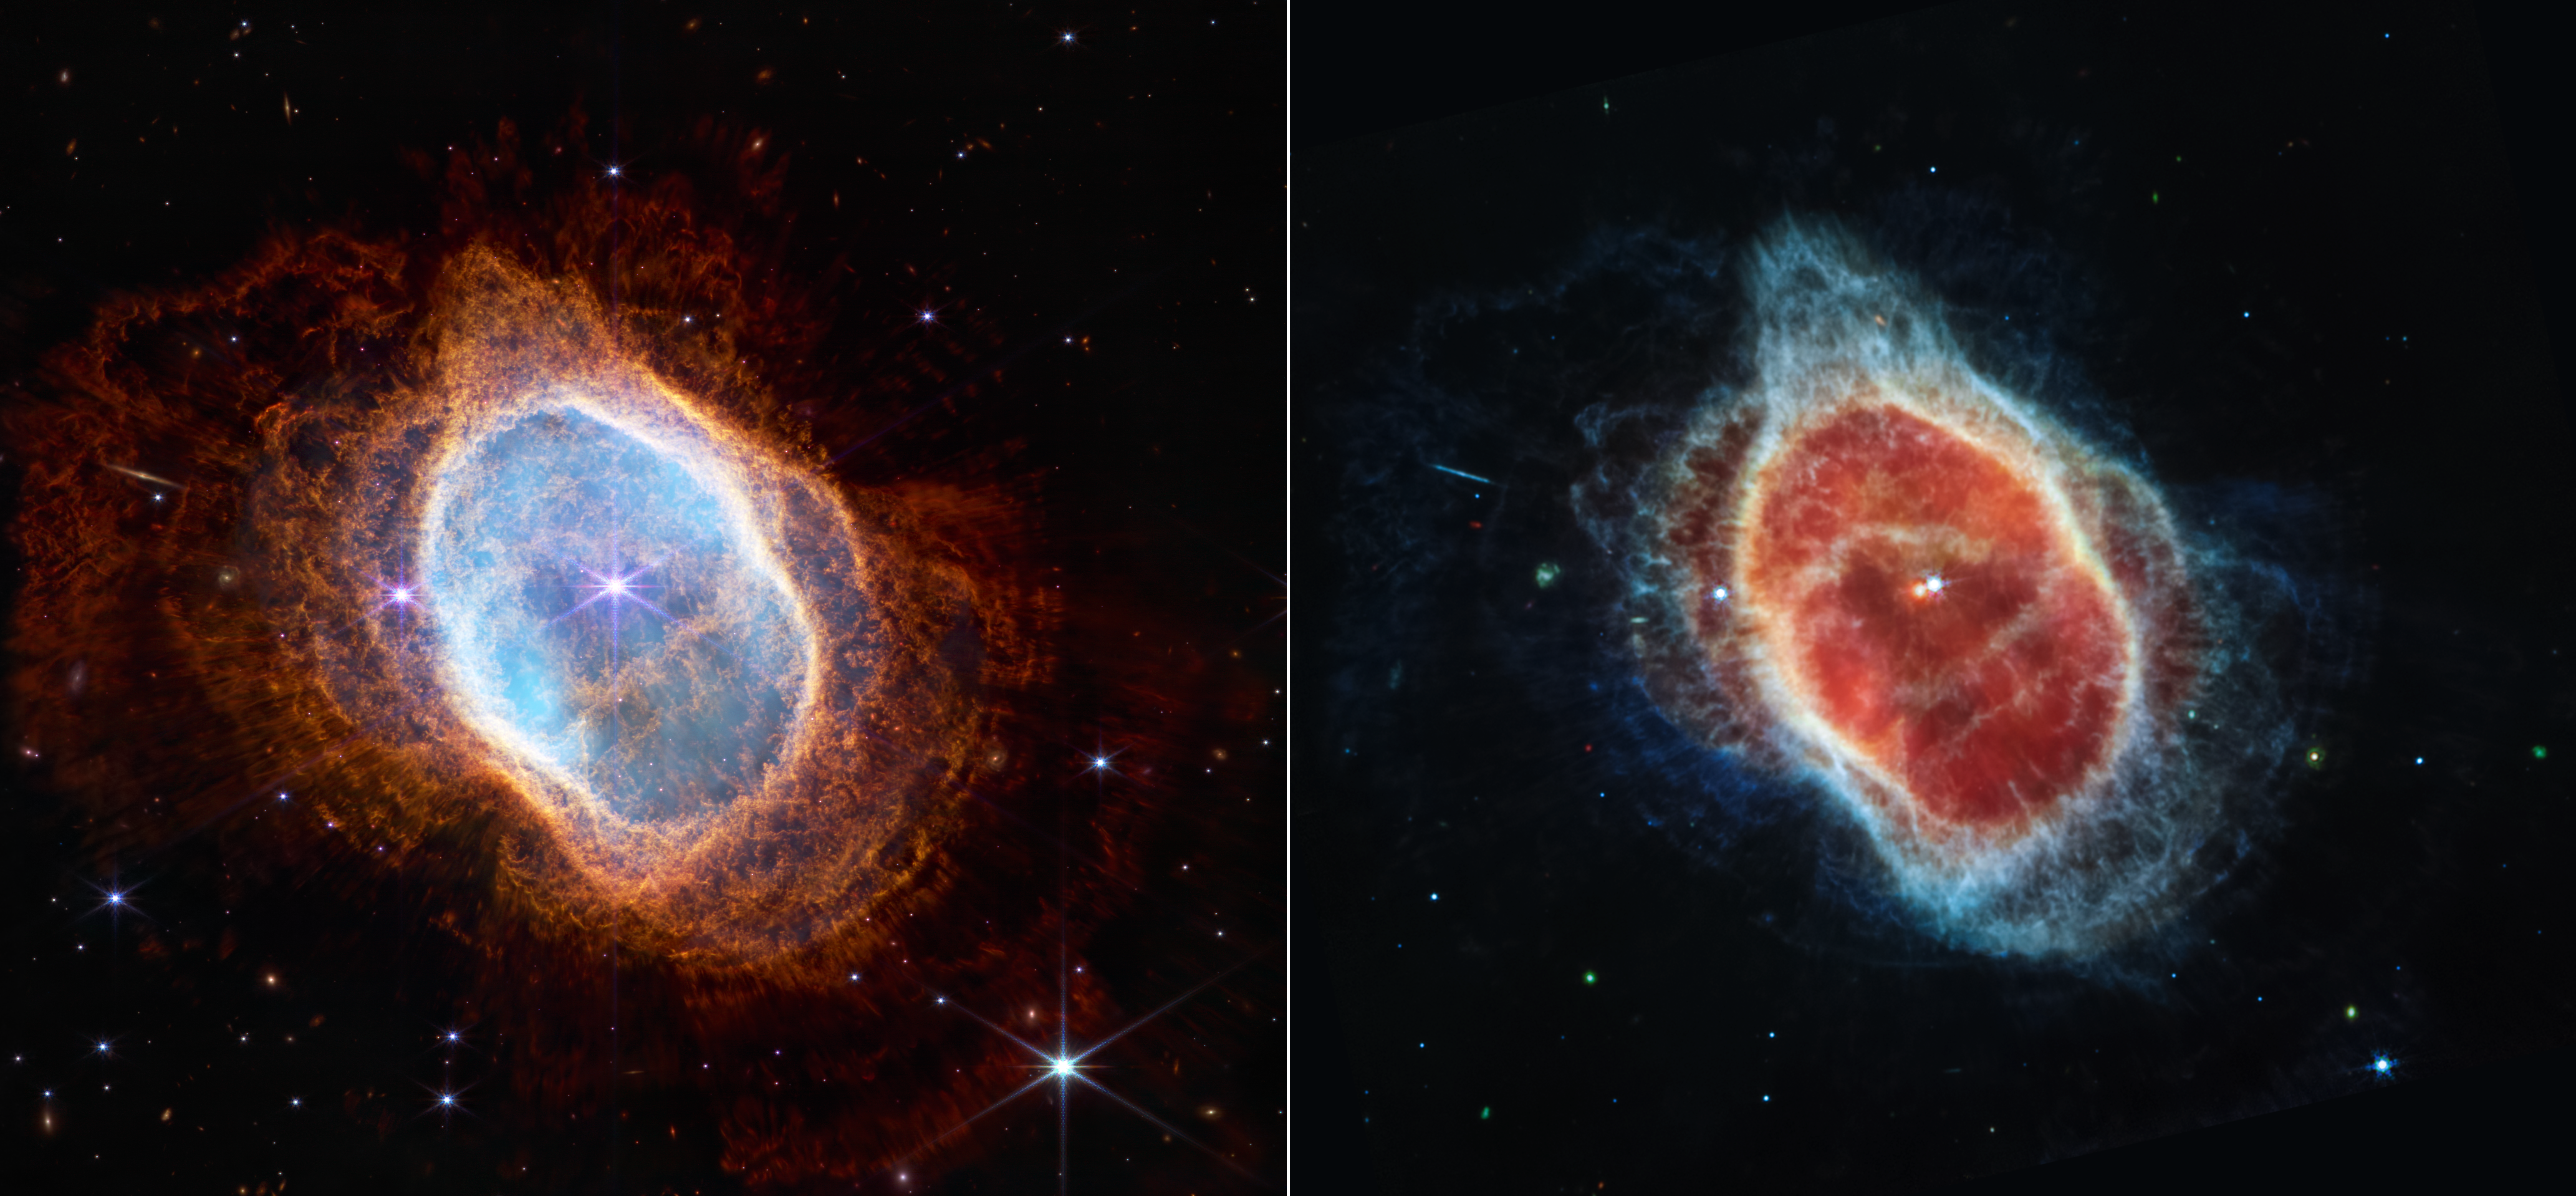

Southern Ring Nebula (NIRCam and MIRI Images Side by Side)

This side-by-side comparison shows observations of the Southern Ring Nebula in near-infrared light, at left, and mid-infrared light, at right, from the NASA/ESA/CSA Webb Telescope.

This scene was created by a white dwarf star — the remnant of a star like our Sun after it shed its outer layers and stopped burning fuel through nuclear fusion. Those outer layers now form the ejected shells seen in this view.

In the Near-Infrared Camera (NIRCam) image, the white dwarf appears to the lower left of the bright, central star, partially hidden by a diffraction spike. The same star appears — but brighter, larger, and redder — in the Mid-Infrared Instrument (MIRI) image. This white dwarf star is cloaked in thick layers of dust, which make it appear larger.

The brighter star in both images hasn’t yet shed its layers. It closely orbits the dimmer white dwarf, helping to distribute what it’s ejected.

Over thousands of years and before it became a white dwarf, the star periodically ejected mass — the visible shells of material. As if on repeat, it contracted, heated up, and then, unable to push out more material, pulsated. Stellar material was sent in all directions — like a rotating sprinkler — and provided the ingredients for this asymmetrical landscape.

Today, the white dwarf is heating up the gas in the inner regions — which appear blue in the left-hand image and red in the right-hand image. Both stars are lighting up the outer regions, shown in orange and blue, respectively.

The images look very different because NIRCam and MIRI collect different wavelengths of light. NIRCam observes near-infrared light, which is closer to the visible wavelengths our eyes detect. MIRI goes farther into the infrared, picking up mid-infrared wavelengths. The second star appears more clearly in the MIRI image, because this instrument can see the gleaming dust around it, bringing it more clearly into view.

The stars — and their layers of light — steal more attention in the NIRCam image, while dust plays the lead in the MIRI image, specifically dust that is illuminated.

Peer at the circular region at the centre of each image. Each contains a wobbly, asymmetrical belt of material. This is where the two ‘bowls’ that make up the nebula meet. (In this view, the nebula is at a 40-degree angle.) This belt is easier to spot in the MIRI image — look for the yellowish circle — but is also visible in the NIRCam image.

The light that travels through the orange dust in the NIRCam image — which look like spotlights — disappears at longer infrared wavelengths in the MIRI image.

In near-infrared light, stars have more prominent diffraction spikes because they are so bright at these wavelengths. In mid-infrared light, diffraction spikes also appear around stars, but they are fainter and smaller (zoom in to spot them).

Physics explains the difference in the resolution of these images. NIRCam delivers high-resolution imaging because these wavelengths of light are shorter. MIRI supplies medium-resolution imagery because its wavelengths are longer; the longer the wavelength, the coarser the images are. But both deliver an incredible amount of detail about every object they observe — providing never-before-seen vistas of the universe.

For a full array of Webb’s first images and spectra, including downloadable files, please visit: https://esawebb.org/initiatives/webbs-first-images/

Credit: NASA, ESA, CSA, STScI, and the Webb ERO Production Team